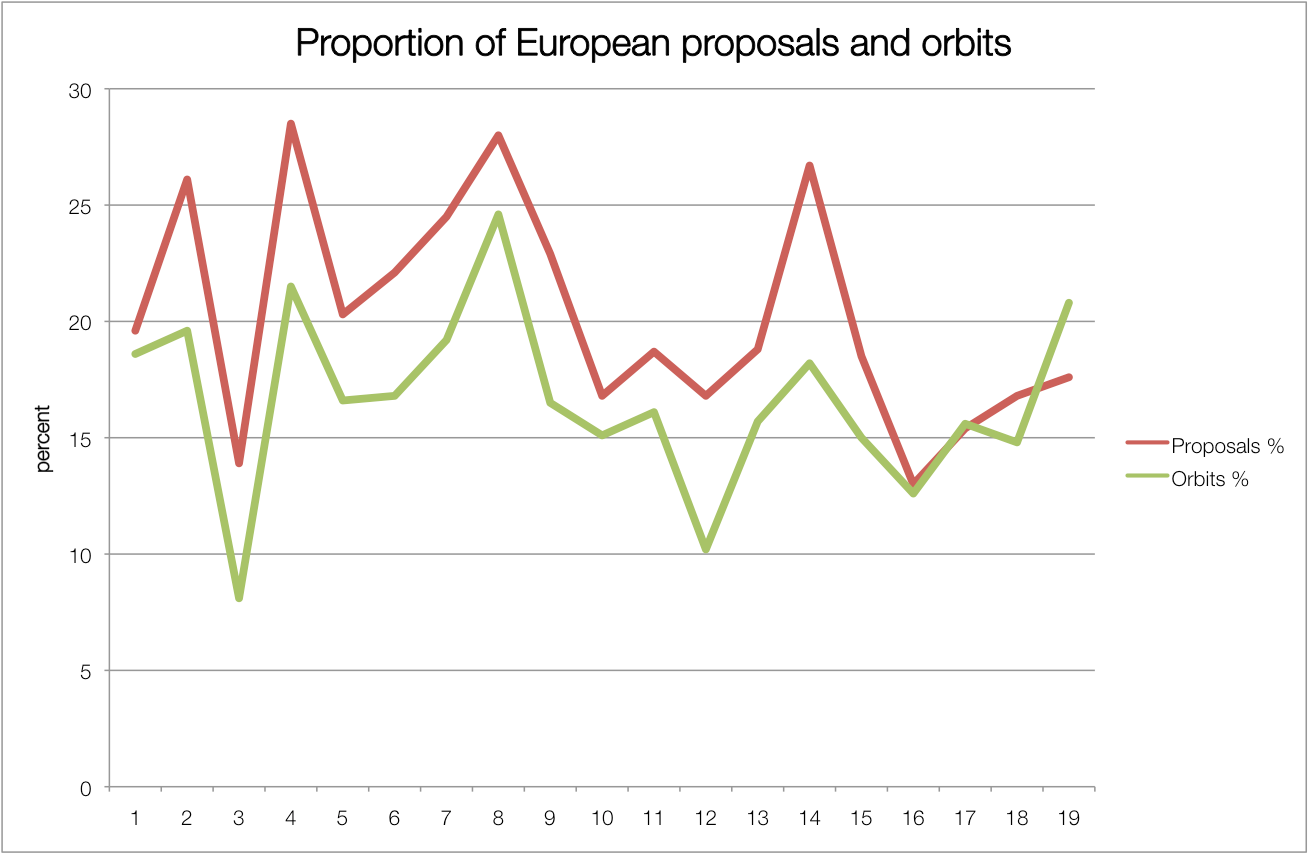

Proportion of European proposals and orbits

Overview of the fraction of observing time that has been rewarded to ESA proposals. It is measured in two different ways: In number of proposals and in time (here measured in units of Hubble orbits, i.e. 96 minutes).

Credit: NASA & ESA